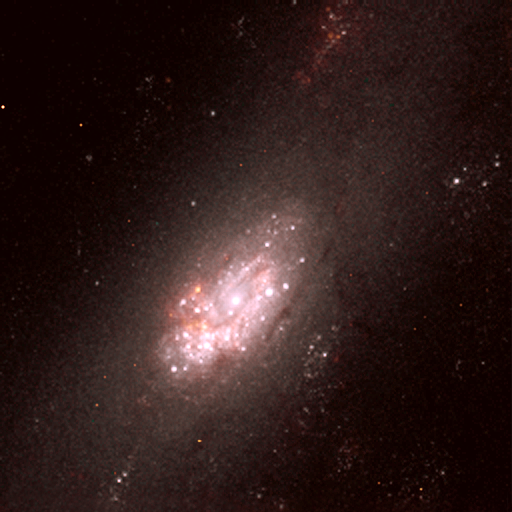

Star Clusters and Circumnuclear Ring in the Centre of NGC 2903 (NICMOS)

This image was obtained with the Near Infrared Camera and Multi-Object Spectrograph (NICMOS) onboard the NASA/ESA Hubble Space Telescope. It shows the region around the core of the barred spiral galaxy NGC 2903. Several bright star clusters (white knots) are seen as well as the circumnuclear ring around the core. The reddish areas are regions of ionised hydrogen and regions where large amounts of dust partly obscure our view. The image was constructed from two infrared NICMOS exposures: 704 seconds through an 1870 nm filter (shown as red) and 192 seconds through a 1600 nm filter (shown as blue). The green colour in the image is a combination of these two exposures. Acknowledgement: The data that went into this Hubble image were originally obtained by William Sparks (Space Telescope Science Institute).

Credit: ESA & NASA